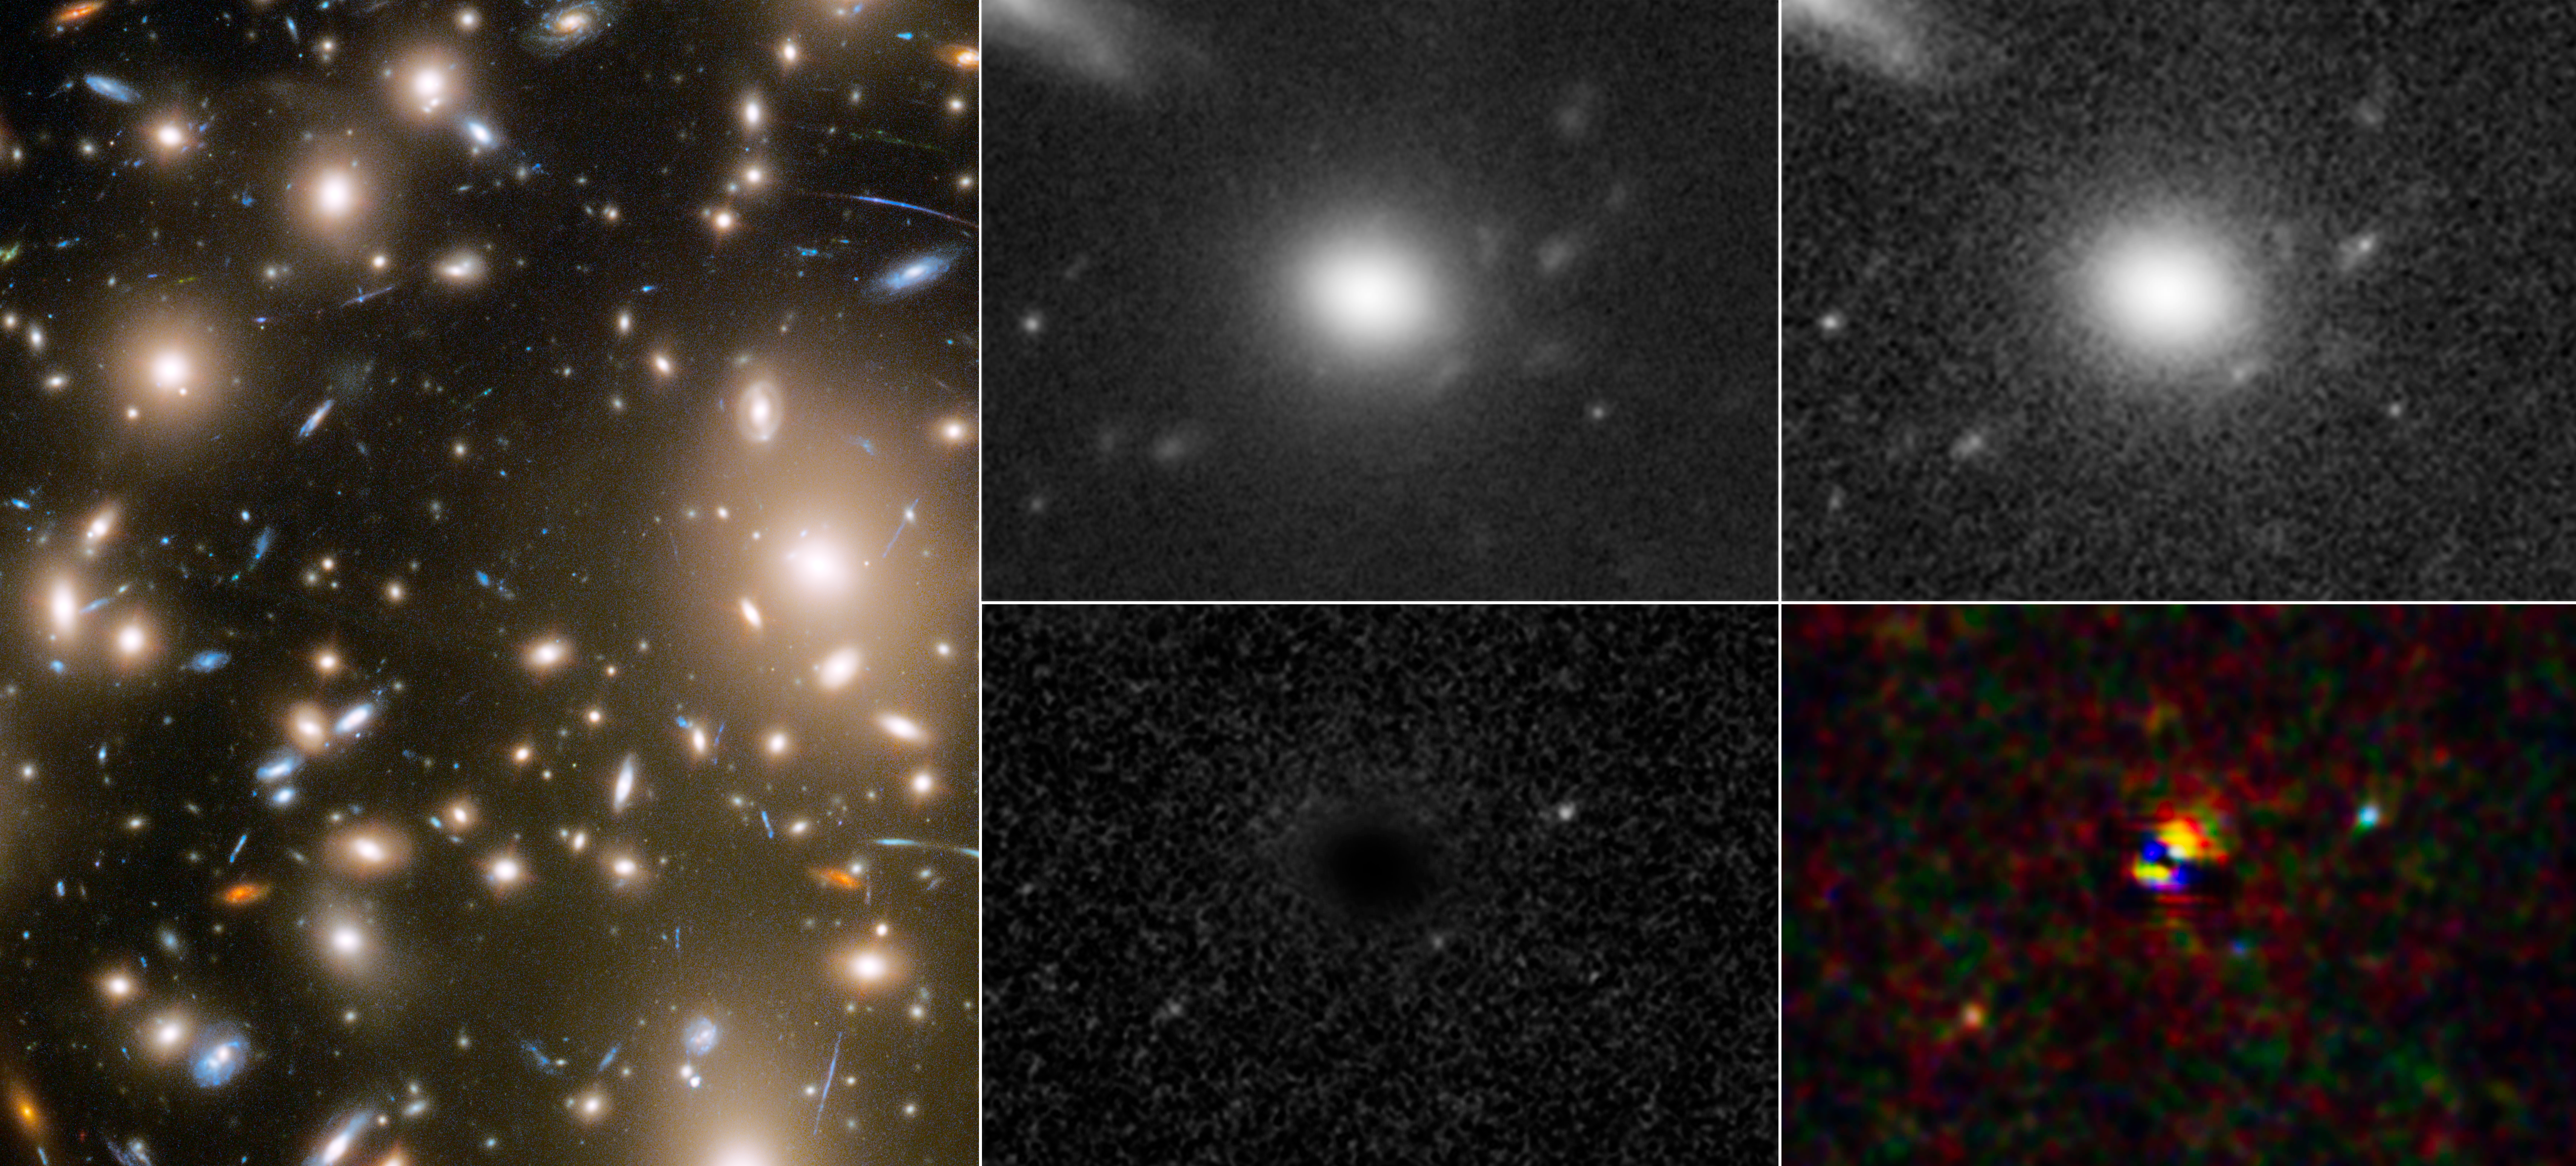

Three Faces of Evolving Supernova (Clean)

As a result of a phenomenon called gravitational lensing, three different moments in a far-off supernova explosion were captured in a single snapshot by the NASA/ESA Hubble Space Telescope. The light from the supernova, which was located behind the galaxy cluster Abell 370, was multiply lensed by the cluster’s immense gravity. This light took three different paths through the cosmic lens of the massive cluster. The three paths were three different lengths, so when the light arrived at Hubble (on the same day in December 2010), the supernova appeared at three different stages of evolution.

The left panel shows the portion of Abell 370 where the multiple images of the supernova appeared. In the top centre is a composite of Hubble observations from 2011 to 2016, showing the locations of the multiply imaged host galaxy after the supernova faded. The top right panel shows a Hubble picture from December 2010, illustrating the three images of the host galaxy and the supernova at different phases in its evolution. The panel in the bottom centre subtracts the image in the panel in the top right from that in the top centre, and shows three different faces of the evolving supernova. Using a similar image subtraction process for multiple filters of data, the panel in the bottom right shows the different colours of the cooling supernova at three different stages in its evolution.

Credit: NASA, ESA, STScI, Wenlei Chen (UMN), Patrick Kelly (UMN), Hubble Frontier Fields